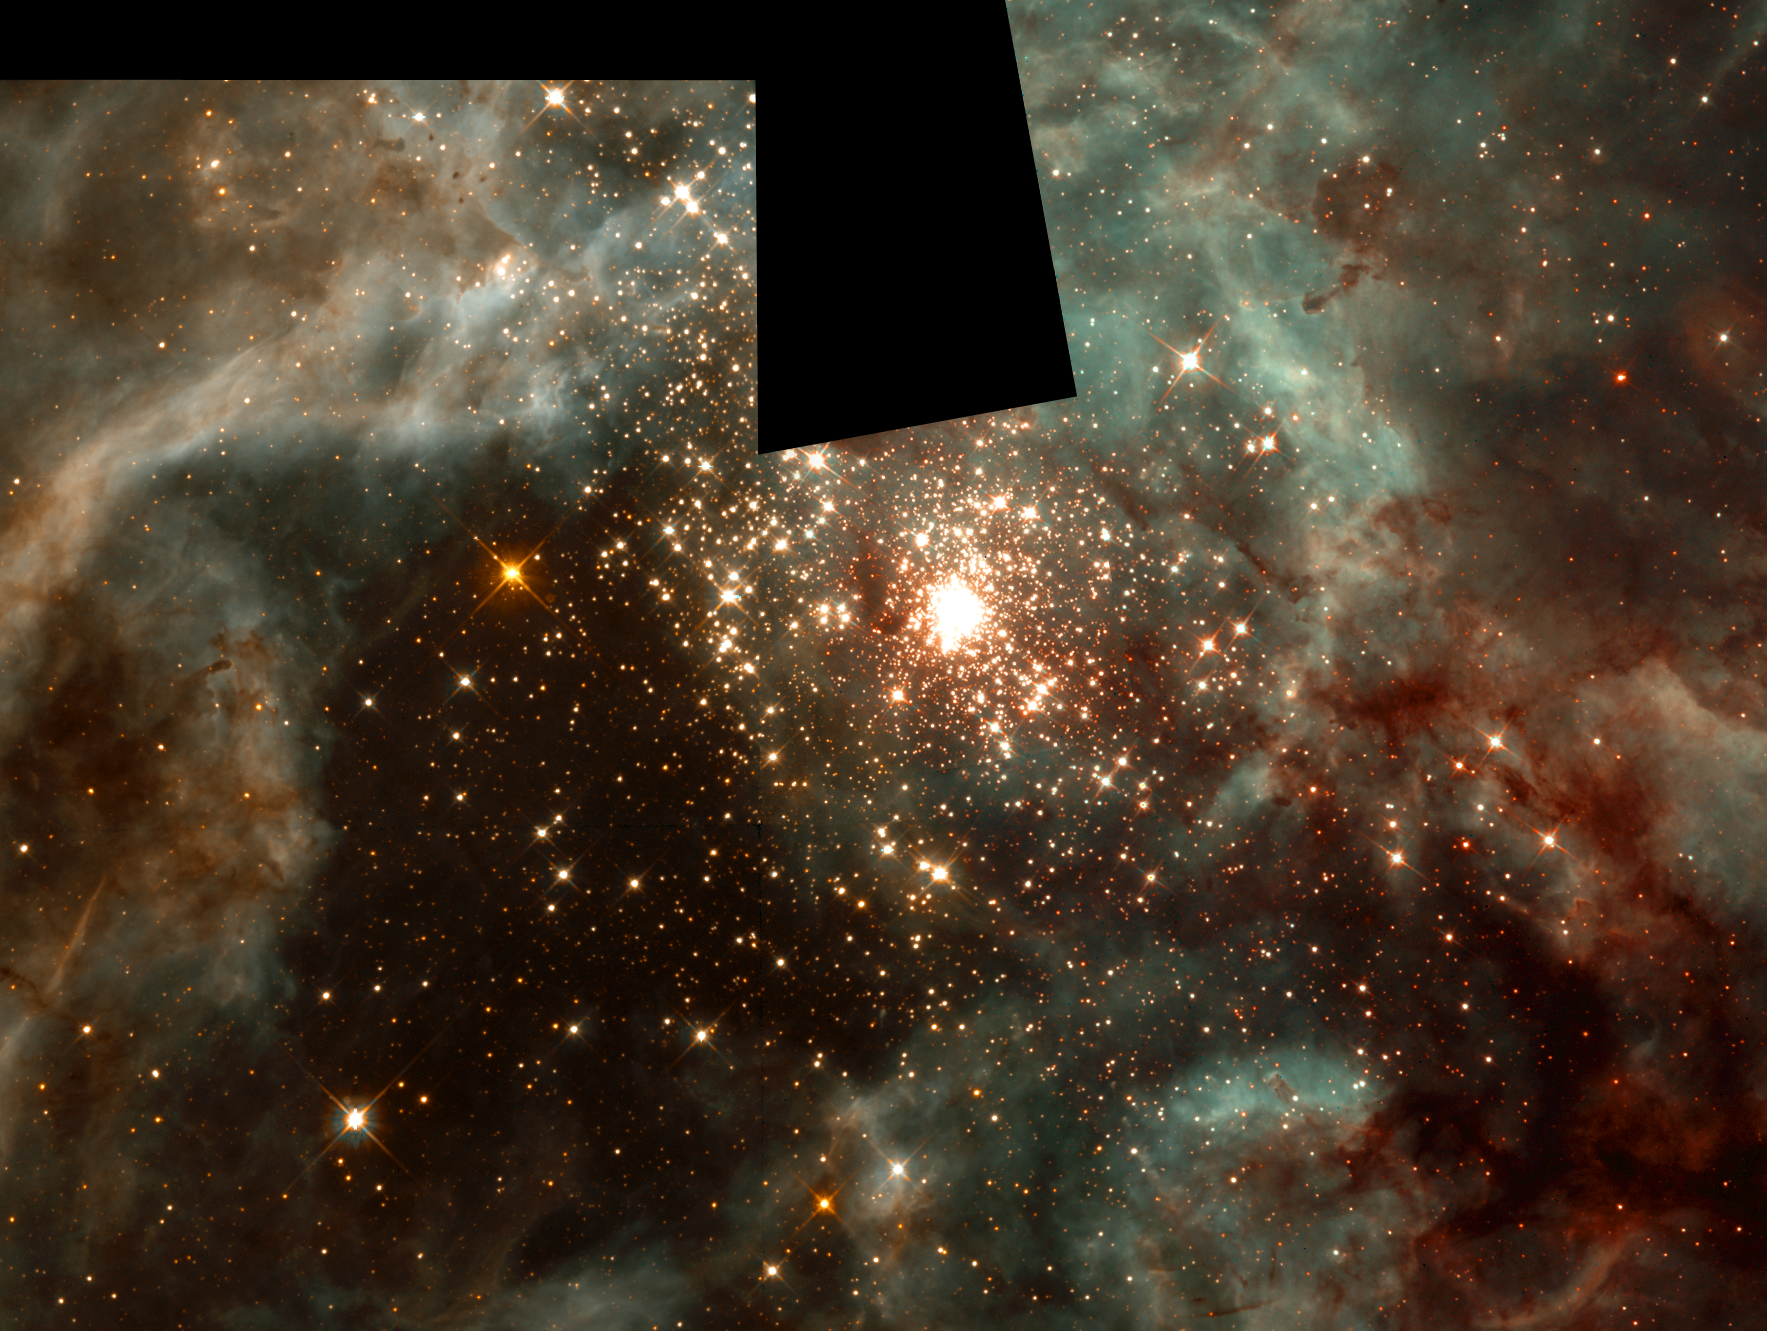

A Grand View of the Birth of 'Hefty' Stars - 30 Doradus Nebula Montage

This picture, taken in visible light with the Hubble Space Telescope's Wide Field and Planetary Camera 2(WFPC2), represents a sweeping view of the 30 Doradus Nebula. But Hubble's infrared camera - the Near Infrared Camera and Multi-Object Spectrometer (NICMOS) - has probed deeper into smaller regions of this nebula to unveil the stormy birth of massive stars. The montages of images in the upper left and upper right represent this deeper view. Each square in the montages is 15.5 light-years (19 arcseconds) across.

Credit: NASA/ESA/Nolan Walborn ( Space Telescope Science Institute, Baltimore, Md.) and Rodolfo Barba (La Plata Observatory, La Plata, Argentina)